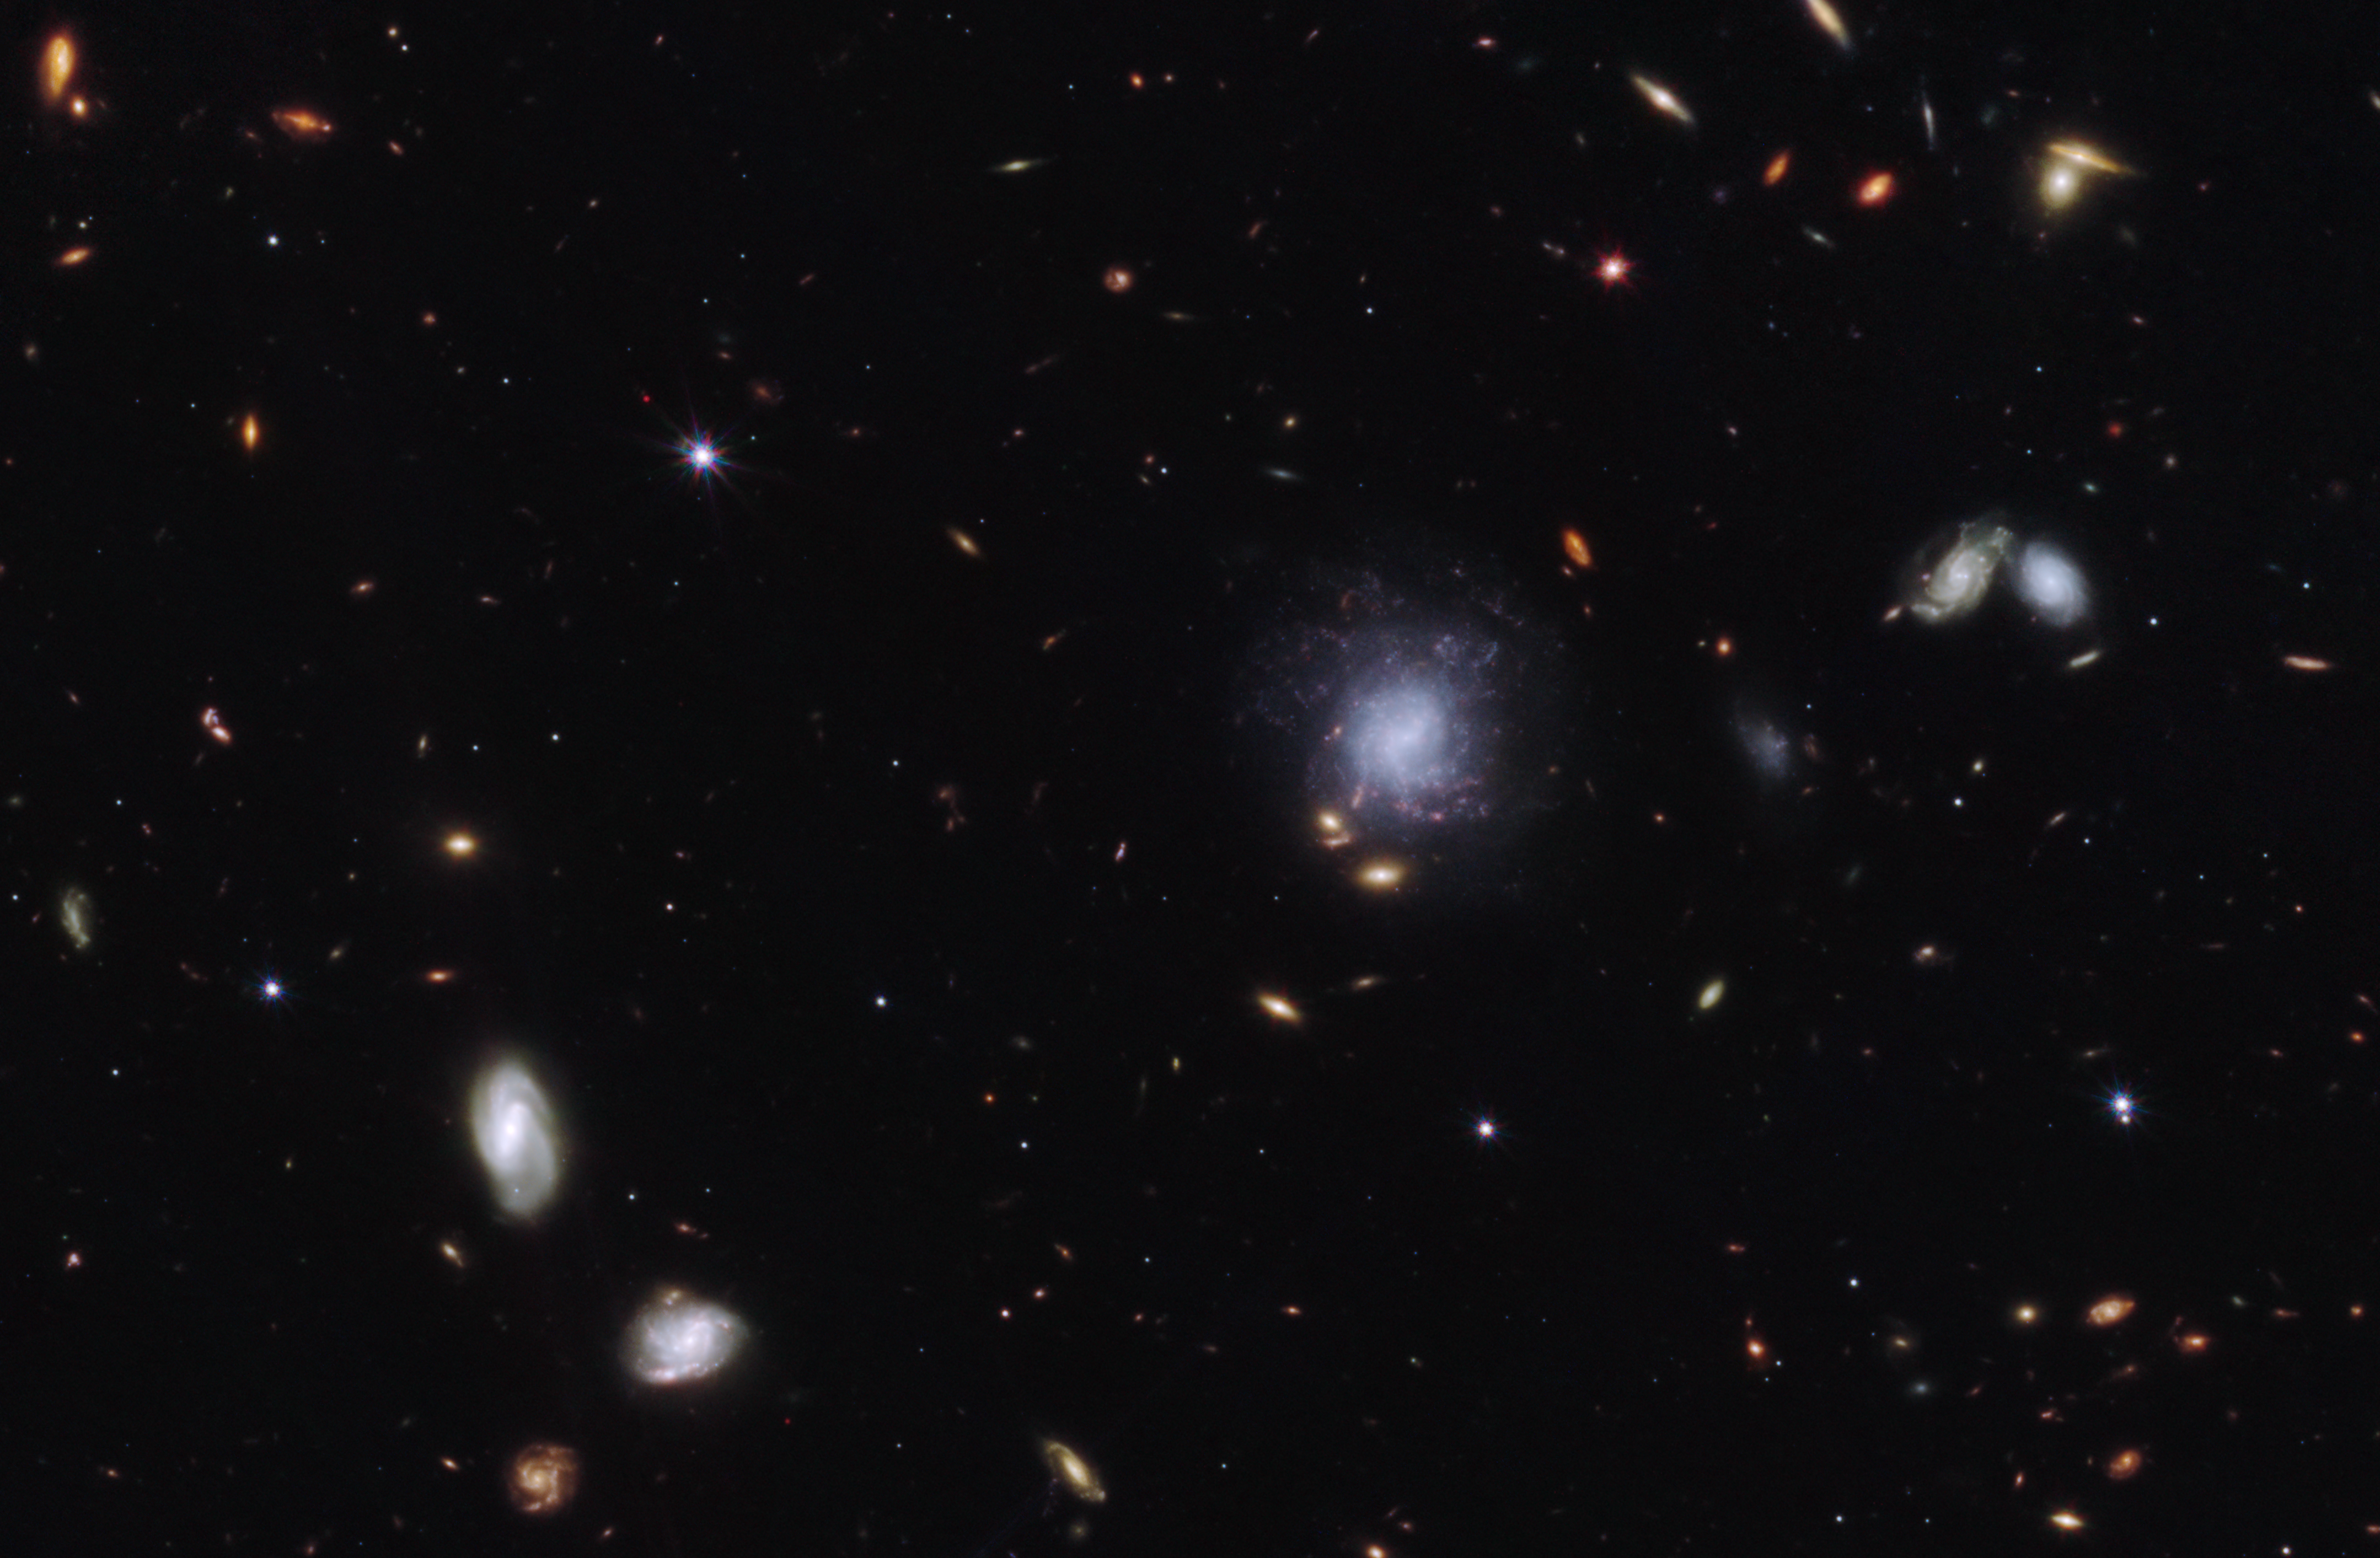

Kilonova and host galaxy (clean)

A team of scientists has used the NASA/ESA/CSA James Webb Space Telescope to observe an exceptionally bright gamma-ray burst, GRB 230307A, and its associated kilonova. Kilonovas—an explosion produced by a neutron star merging with either a black hole or with another neutron star—are extremely rare, making it difficult to observe these events. The highly sensitive infrared capabilities of Webb helped scientists identify the home address of the two neutron stars that created the kilonova.

This image from Webb’s NIRCam (Near-Infrared Camera) instrument highlights GRB 230307A’s kilonova and its former home galaxy among their local environment of other galaxies and foreground stars. The neutron stars were kicked out of their home galaxy and travelled the distance of about 120,000 light-years, approximately the diameter of the Milky Way galaxy, before finally merging several hundred million years later.

This image is a composite of separate exposures acquired by the James Webb Space Telescope using the NIRCam instrument. Several filters were used to sample wide wavelength ranges. The colour results from assigning different hues (colours) to each monochromatic (grayscale) image associated with an individual filter. In this case, the assigned colours are: Blue: F115W + F150W Green: F277W Red: F356W + F444W

Credit: NASA, ESA, CSA, STScI, A. Levan (IMAPP, Warw), A. Pagan (STScI)